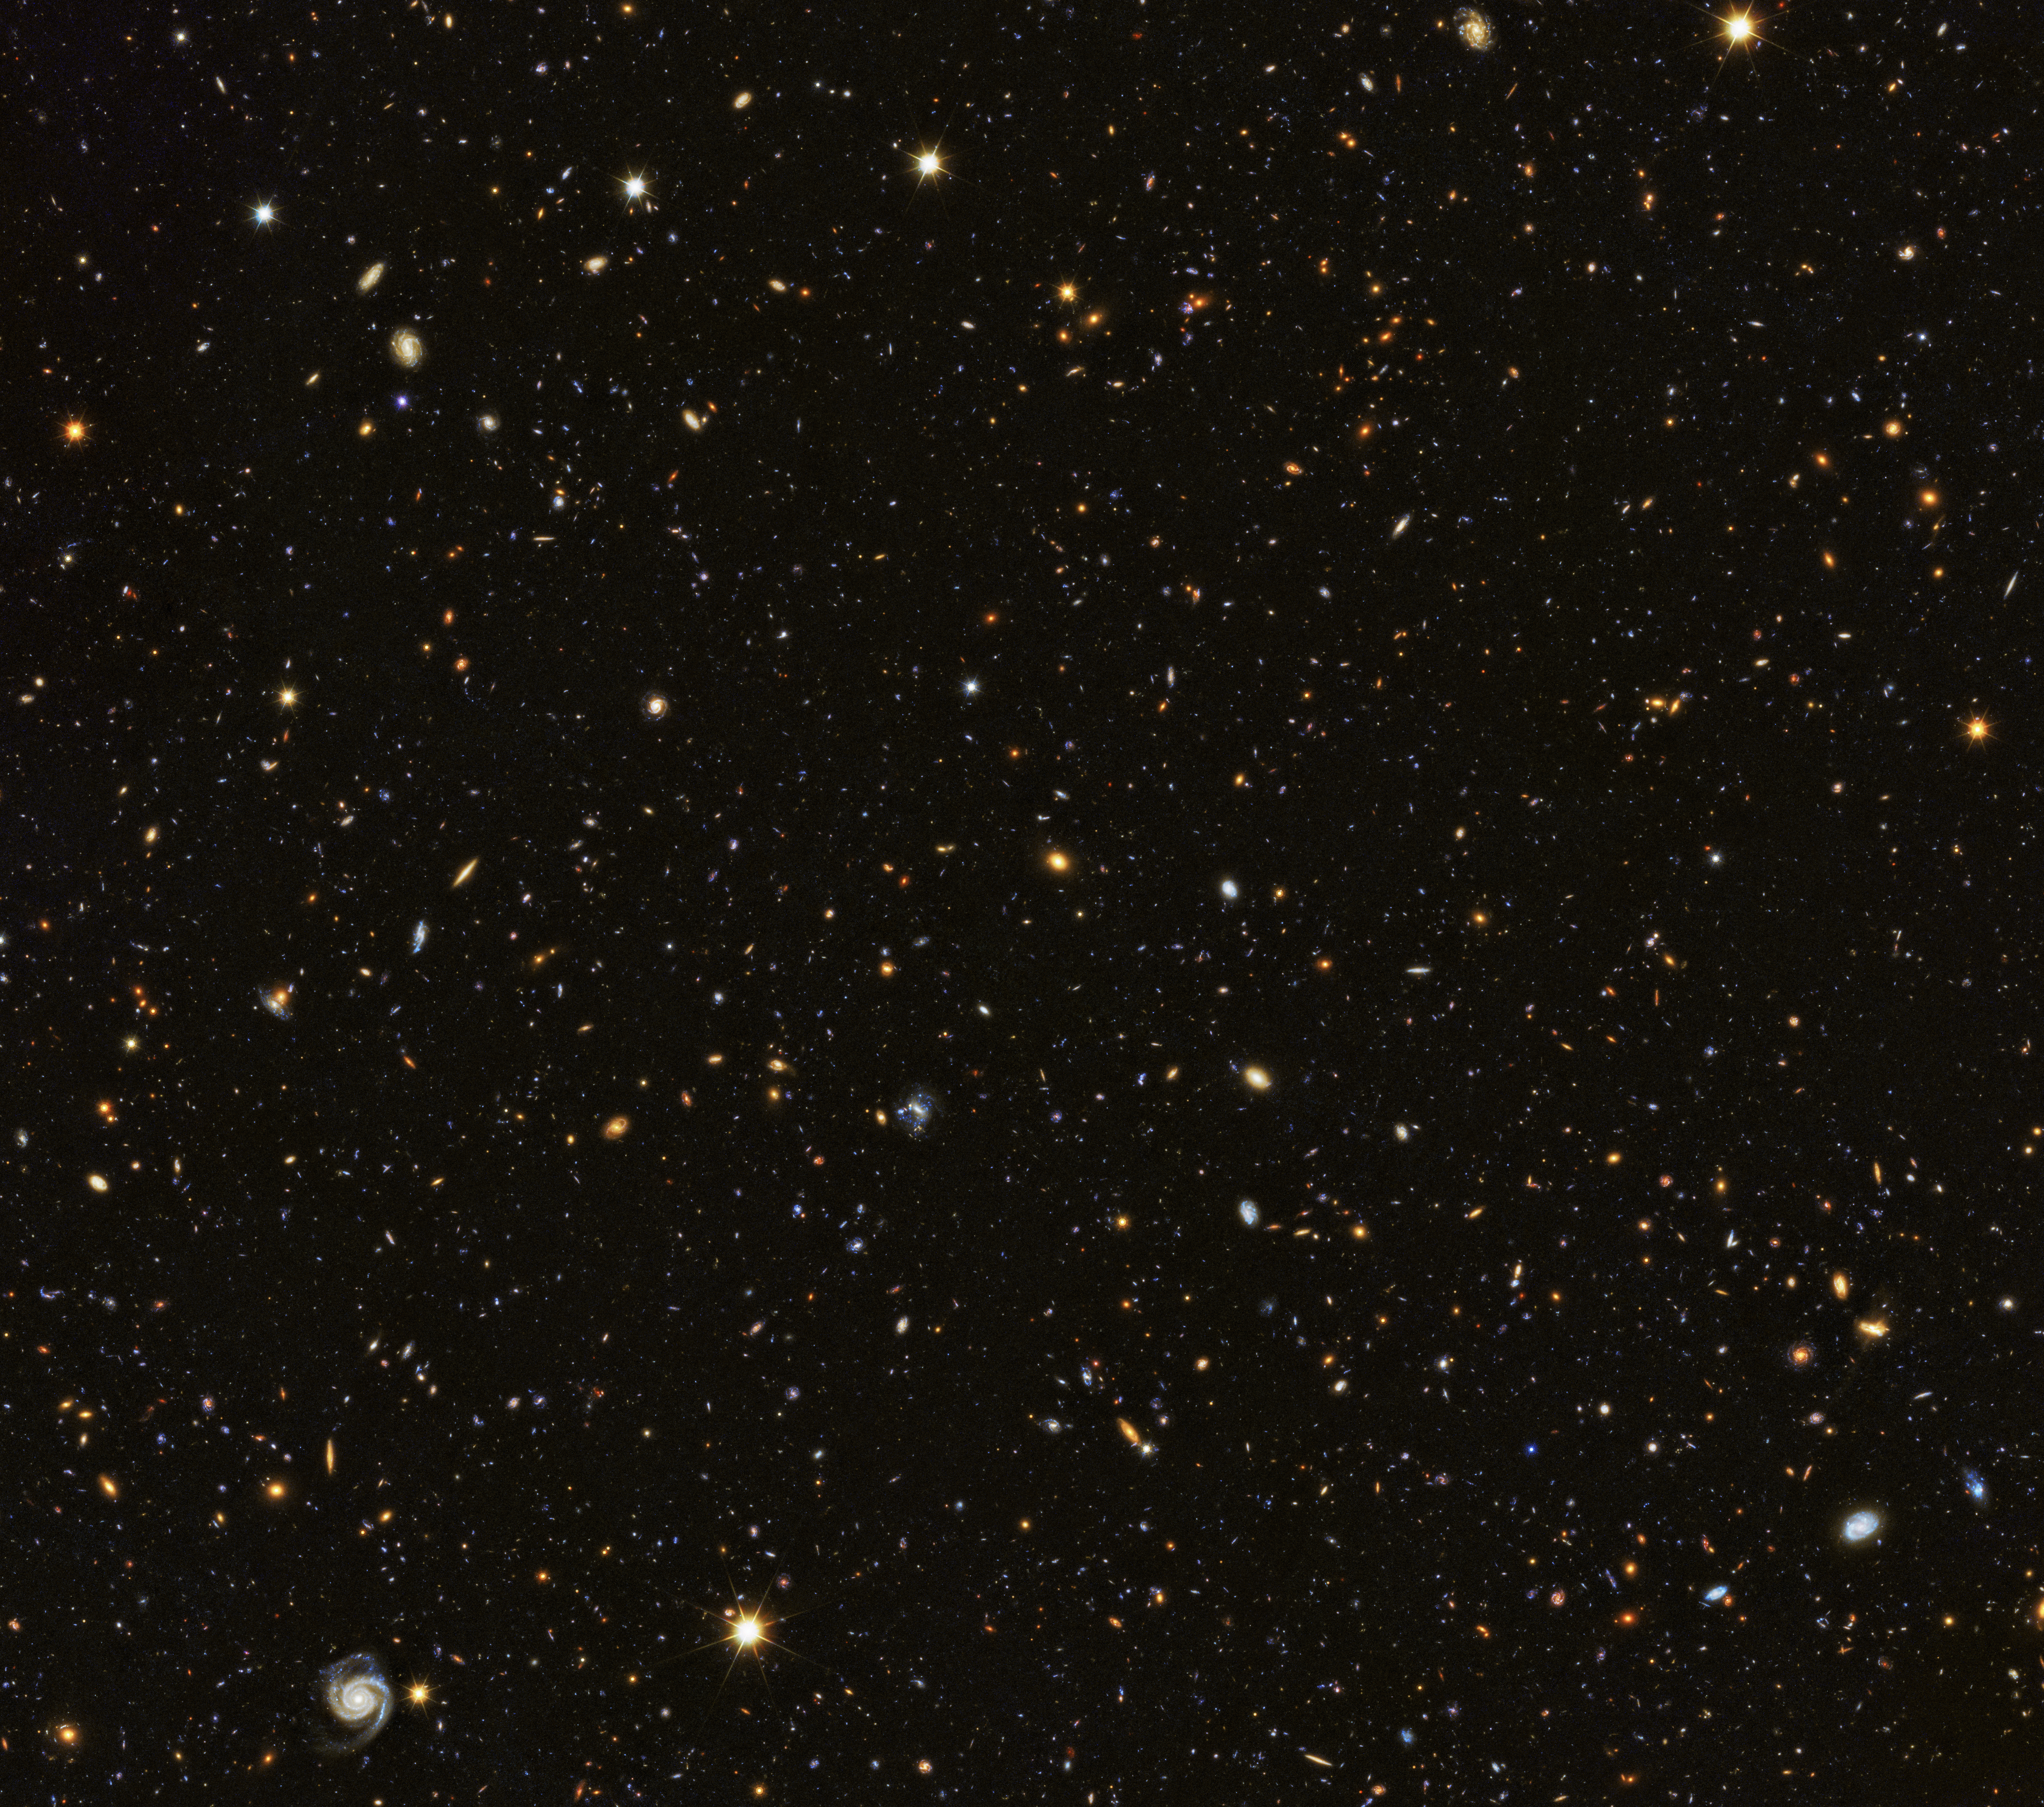

Hubble contributes to painting a picture of the evolving Universe

The Hubble Deep Field from 1995 allowed astronomers a first glimpse into the early Universe. This first picture was followed later by an even deeper observation, the Hubble Ultra Deep Field in 2004. Both images were observed in visible light, the same form of light human eyes can see. But astronomers are also interested in the many forms of invisible light out in the Universe. Therefore, the Ultra Deep Field was later observed in the infrared and the ultraviolet as well, allowing scientists to learn even more about the Universe and to look back even further into its history.

It is less known that the famous deep field observations were not the only images the NASA/ESA Hubble Space Telescope took of the distant Universe. Hubble is also an essential part of the GOODS (The Great Observatories Origins Deep Survey) programme, which unites extremely deep observations from several space telescopes: NASA’s Spitzer and Chandra; ESA's Herschel and XMM-Newton; and Hubble.

Together these observatories observe two patches of the sky, the GOODS North and the GOODS South fields, with the aim of studying it in as many different wavelengths as possible. The new image here shows part of the GOODS North Field; it includes new Hubble data at ultraviolet wavelengths in addition to the existing data. Because Earth’s atmosphere filters out most ultraviolet light, these observations can only be accomplished from space.

The observation programme, called the Hubble Deep UV (HDUV) Legacy Survey, harnessed the ultraviolet vision of Hubble’s Wide Field Camera 3. This study extends and builds on the previous Hubble multi-wavelength data in the CANDELS-Deep (Cosmic Assembly Near-infrared Deep Extragalactic Legacy Survey) fields within the central part of the GOODS (The Great Observatories Origins Deep Survey) fields. This mosaic is 14 times the area of the Hubble Ultraviolet Ultra Deep Field released in 2014.

Credit: ESA/Hubble & NASA